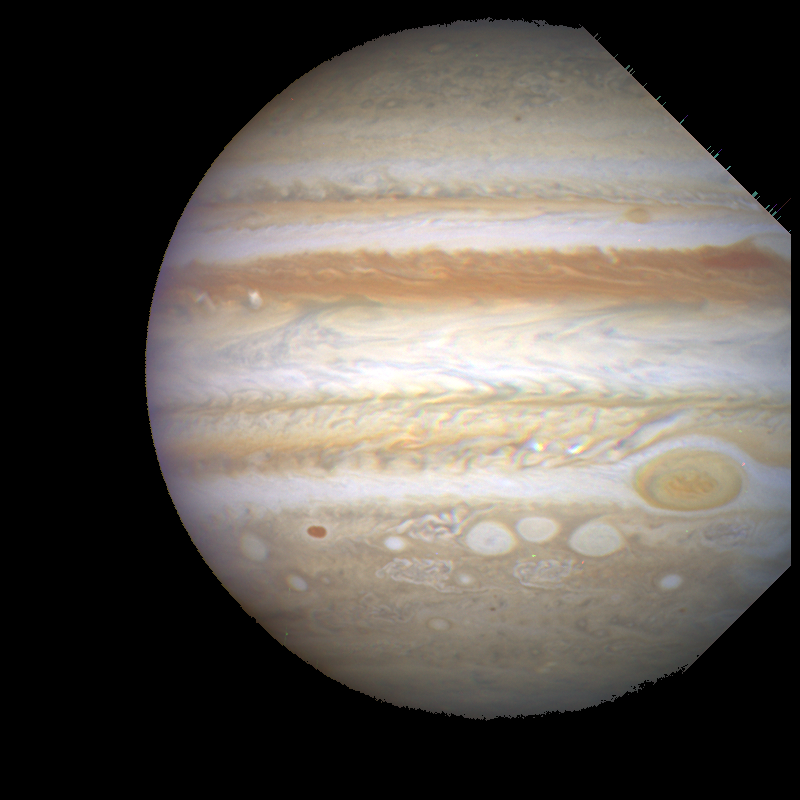

Stormy Weather on Jupiter

Hubble Space Telescope is following dramatic and rapid changes in Jupiter's turbulent atmosphere that will be critical for targeting observations made by the Galileo space probe when it arrives at the giant planet later this year.

This Hubble image provides a detailed look at a unique cluster of three white oval-shaped storms that lie southwest (below and to the left) of Jupiter's Great Red Spot.

Credit: Reta Beebe, Amy Simon (New Mexico State Univ.), and NASA/ESA